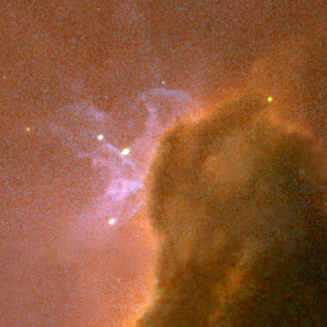

Closeup of Filamentary Structure in Trifid Nebula

The dust, silhouetted against glowing gas and illuminated by starlight, cradles the bright stars at the heart of the Trifid Nebula. This nebula, also known as Messier 20 and NGC 6514, lies within our own Milky Way Galaxy about 9,000 light-years (2,700 parsecs) from Earth, in the constellation Sagittarius.

Credit: NASA, ESA, and The Hubble Heritage Team (AURA/STScI)